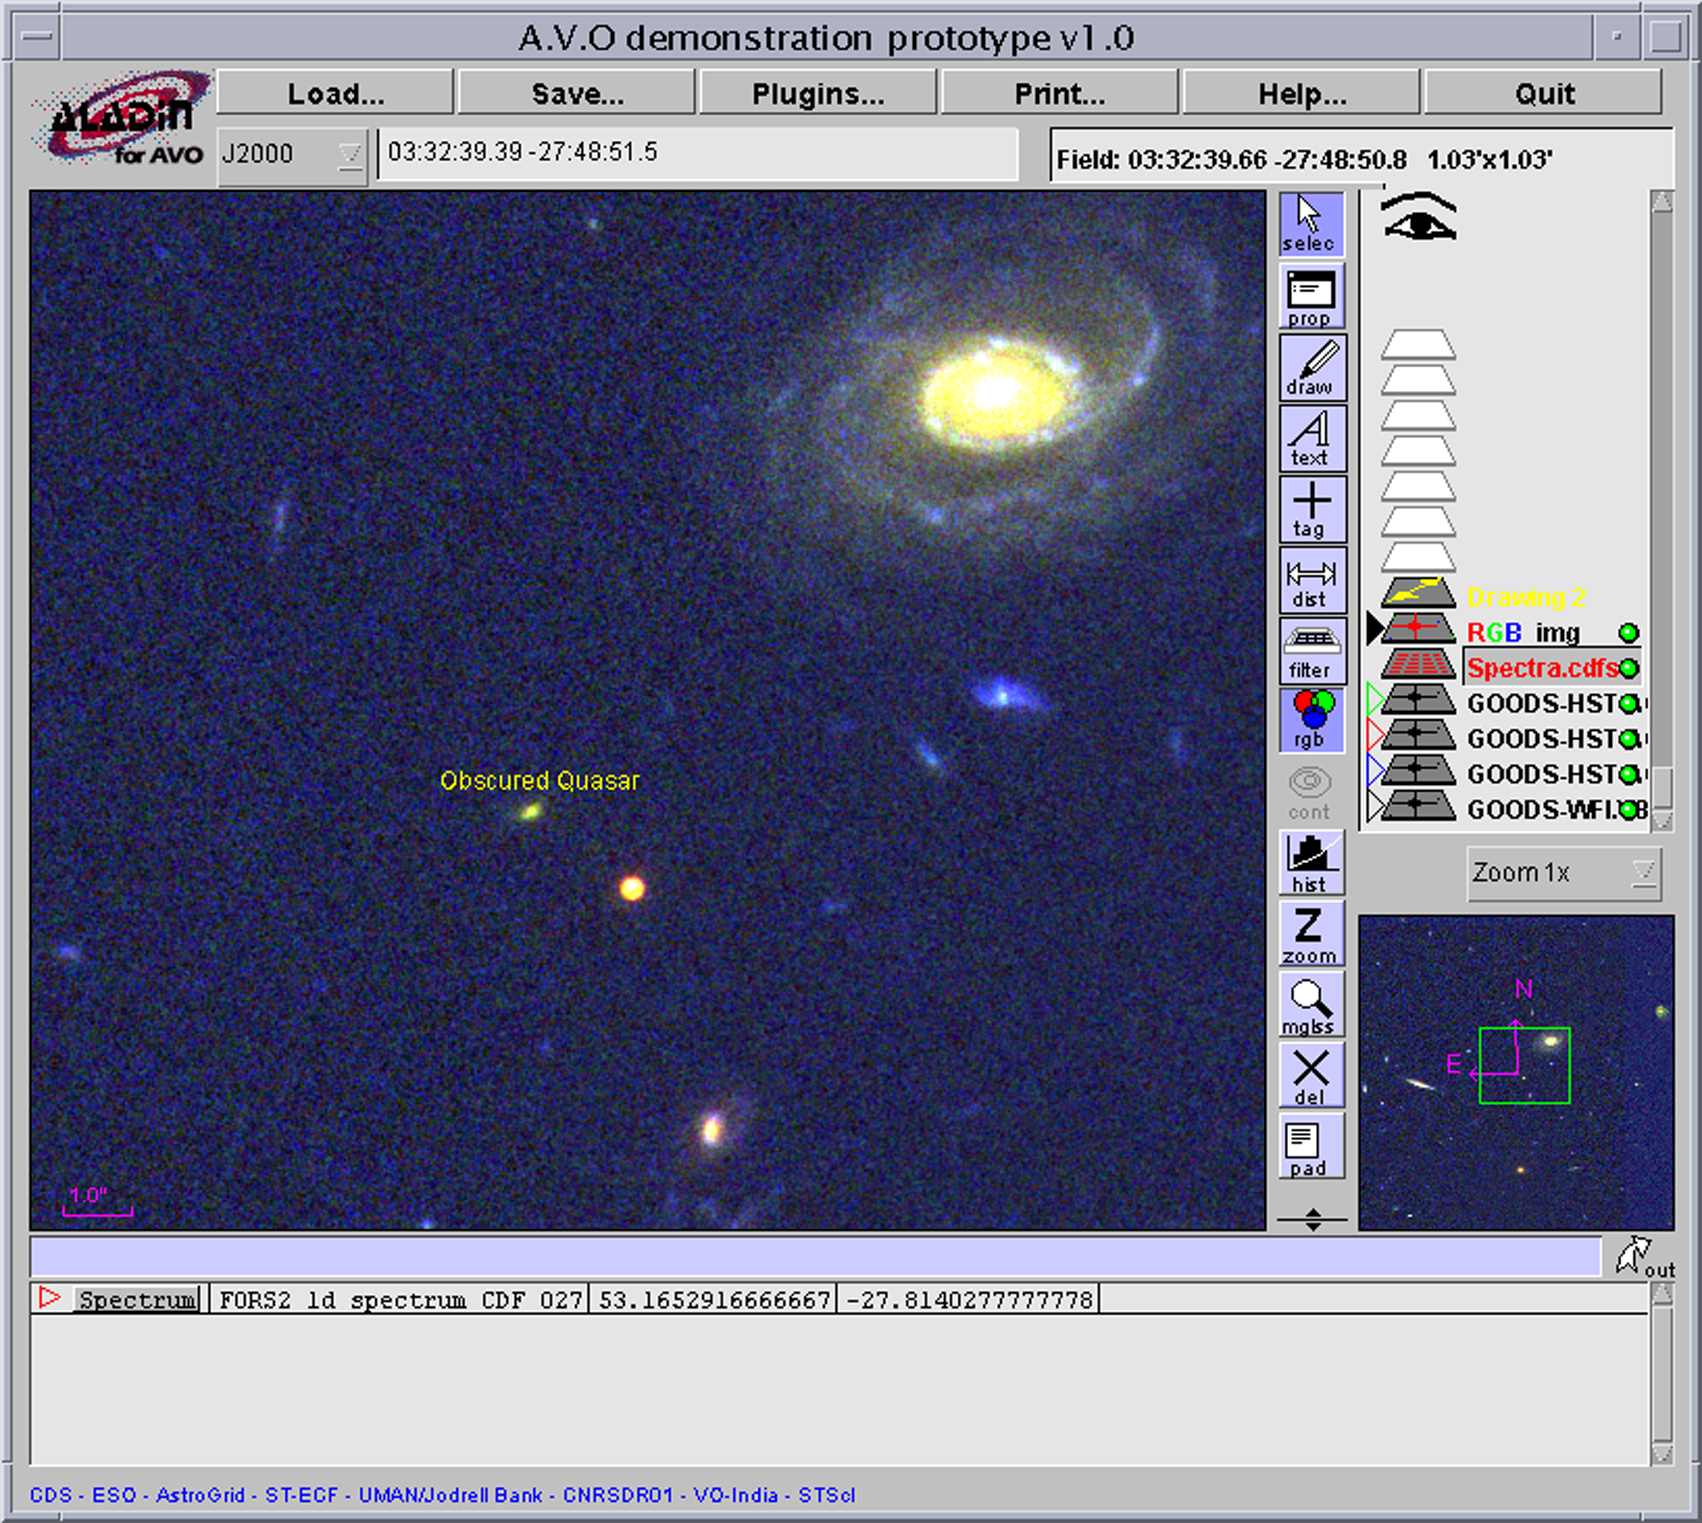

The AVO visualisation interface

Here the Astrophysical Virtual Observatory (AVO) visualisation interface is seen. This interface is based on Centre de Données Astronomiques de Strasbourg's Aladin.

AVO devises new methods for accessing and describing data in a way that allows images, spectra and information from different sources to work together seamlessly.

Credit: ESA/NASA, the AVO project and Paolo Padovani